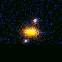

Hubble's Top Ten Gravitational Lenses. A View of HST 14164+5215

HST 14164+5215 is a pair of bluish lensed images symmetrically placed around a brighter, redder galaxy.

Credit: Kavan Ratnatunga (Carnegie Mellon Univ.) and NASA/ESA